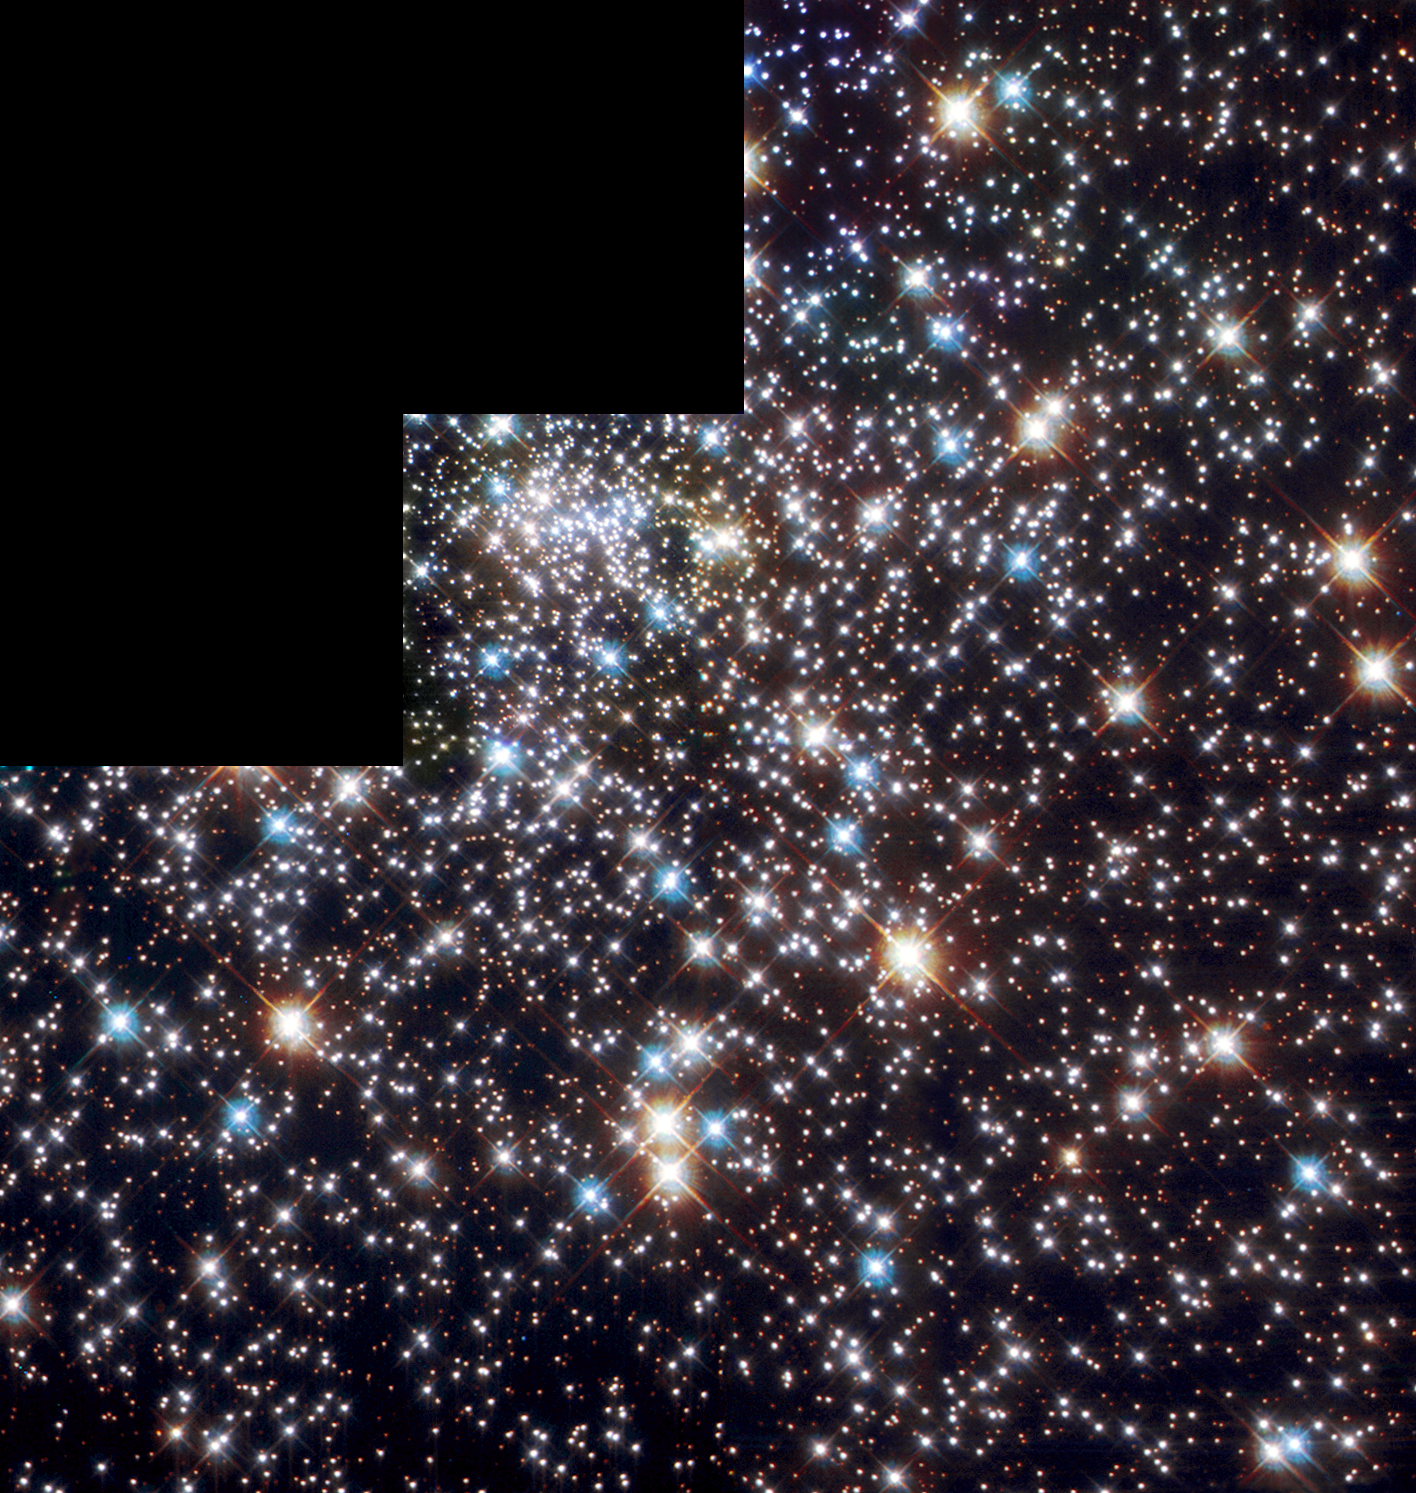

The globular cluster NGC 6397

This ESA/NASA/ESA Hubble Space Telescope Wide Field Planetary Camera 2 image shows the globular cluster NGC 6397 in the constellation Ara (the Altar). It is composed of six exposures through different filters: violet/indigo (Strvmgren u, 345 nm, 15080 seconds), blue (B, 418 nm, 8580 seconds), dark green (V, 515 nm, 978 seconds), light green (H-alpha, 656 nm, 24180 seconds), red-orange (R, 678 nm, 1538 seconds), and red (I, 839 nm, 978 seconds). The cluster is home to a highly unusual system consisting of a fast spinning pulsar and a bloated red companion star.

Credit: European Space Agency & Francesco Ferraro (Bologna Astronomical Observatory)